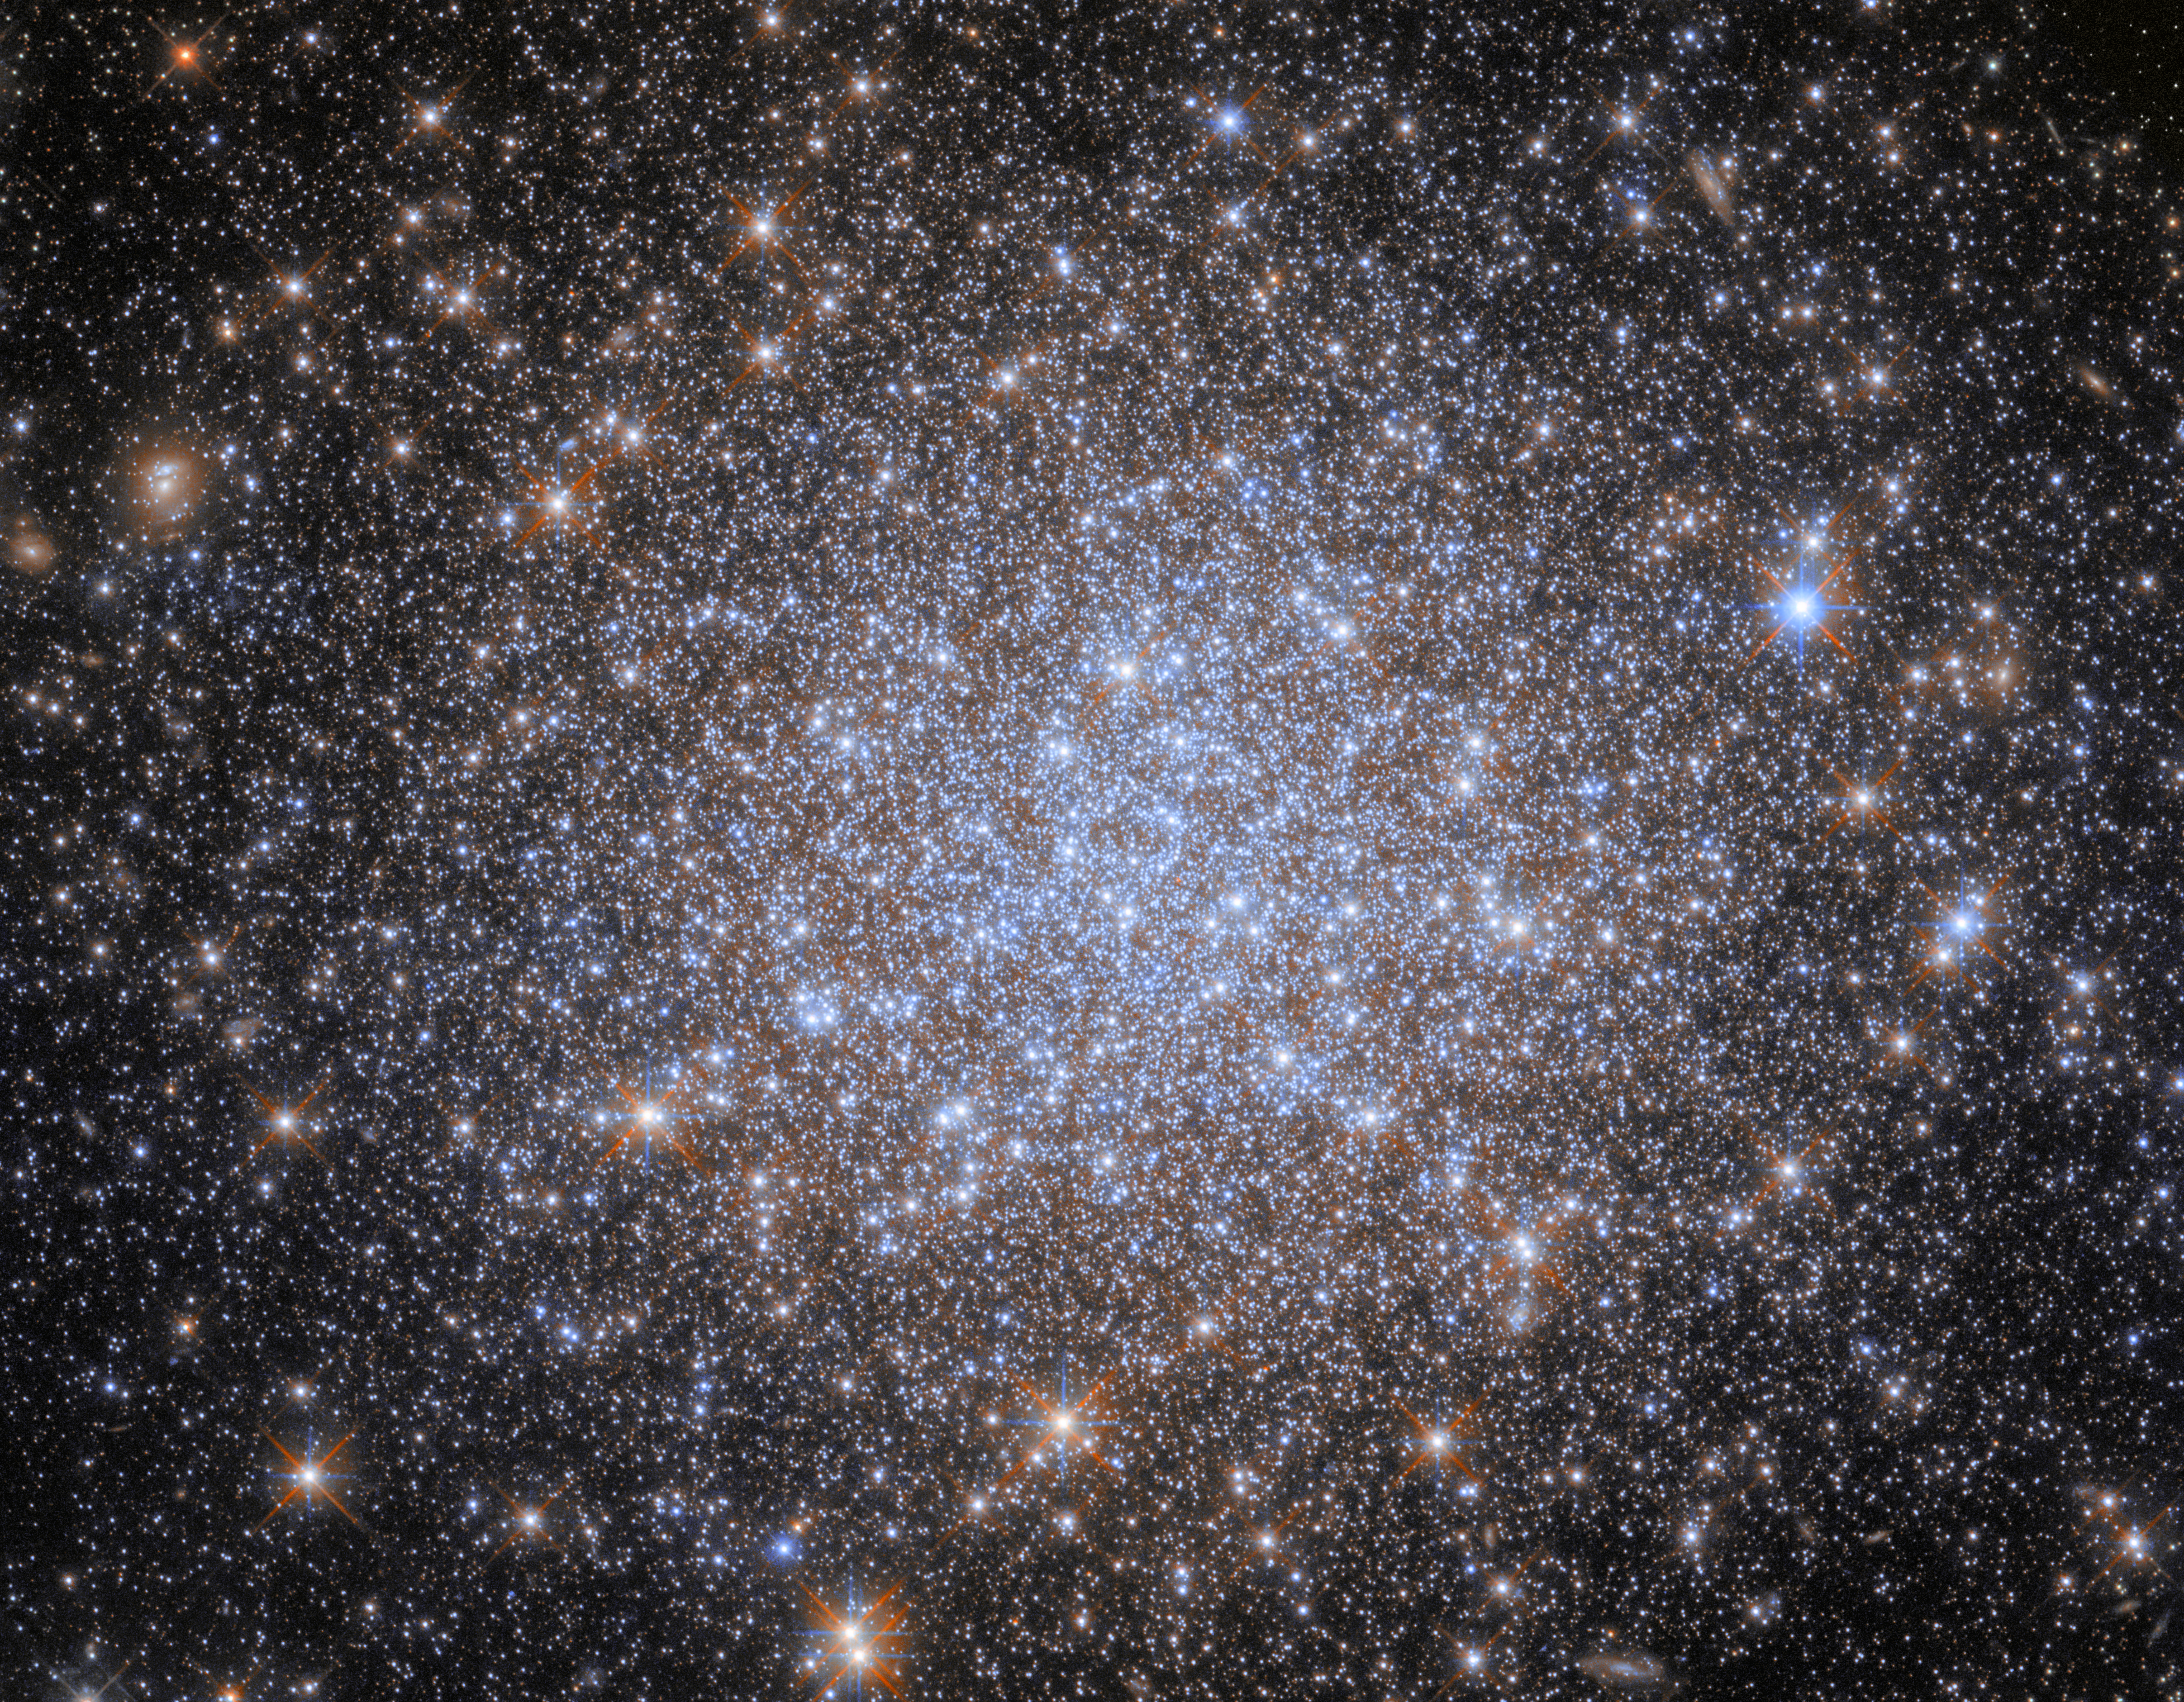

Celestial fossils

This densely populated group of stars is the globular cluster known as NGC 1841, which is found within the Large Magellanic Cloud (LMC), a satellite galaxy to the Milky Way galaxy that lies about 162 000 light-years away. Satellite galaxies are galaxies that are bound by gravity in orbits around a more massive host galaxy. We typically think of our galaxy’s nearest galactic companion as being the Andromeda Galaxy, but it would be more accurate to say that Andromeda is the nearest galaxy that is not in orbit around the Milky Way galaxy. In fact, our galaxy is orbited by tens of known satellite galaxies that are far closer than Andromeda, the largest and brightest of which is the LMC, which is easily visible to the naked eye from the southern hemisphere (although this is decreasingly the case thanks to light pollution).

The LMC is home to many globular clusters. These celestial bodies fall somewhere between open clusters — which are much less dense and tightly bound — and small, compact galaxies. Increasingly sophisticated observations have revealed the stellar populations and other characteristics of globular clusters to be varied and complex, and it is not well understood how these tightly-packed clusters form. However, there are certain consistencies across all globular clusters: they are very stable and so are capable of lasting a long time, and can therefore be very old. This means that globular clusters often contain large numbers of very old stars, which make them something akin to celestial ‘fossils’. Just as fossils provide insight into the early development of life on Earth, globular clusters such as NGC 1841 can provide insights into very early star formation in galaxies.

Credit: ESA/Hubble & NASA, A. Sarajedini, F. Niederhofer